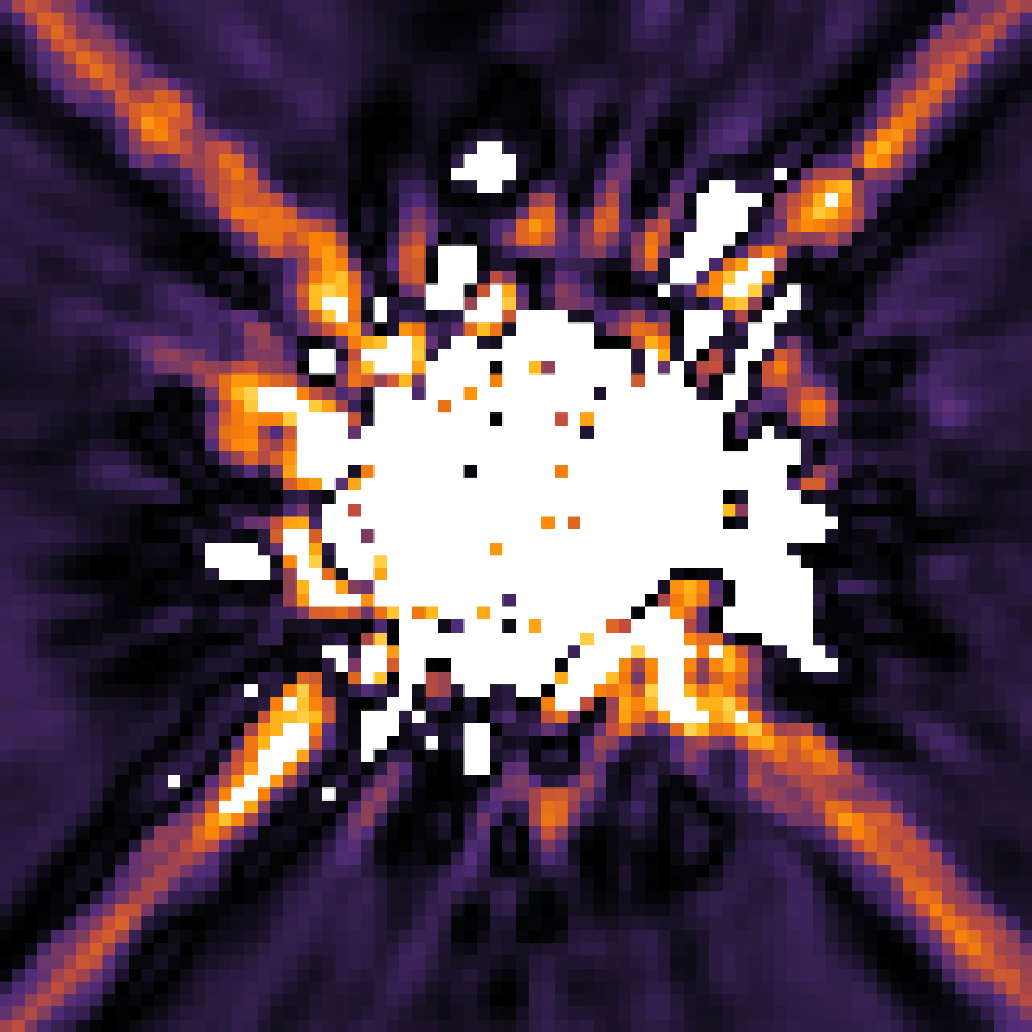

Image of HR 8799 planetary system

This is an image of the star HR 8799 taken by Hubble's Near Infrared Camera and Multi-Object Spectrometer (NICMOS) in 1998. A mask within the camera (coronagraph) blocks most of the light from the star. In addition, software has been used to digitally subtract more starlight. Nevertheless, scattered light from HR 8799 dominates the image, obscuring the faint planets.

Credit: NASA, ESA, and R. Soummer (STScI)